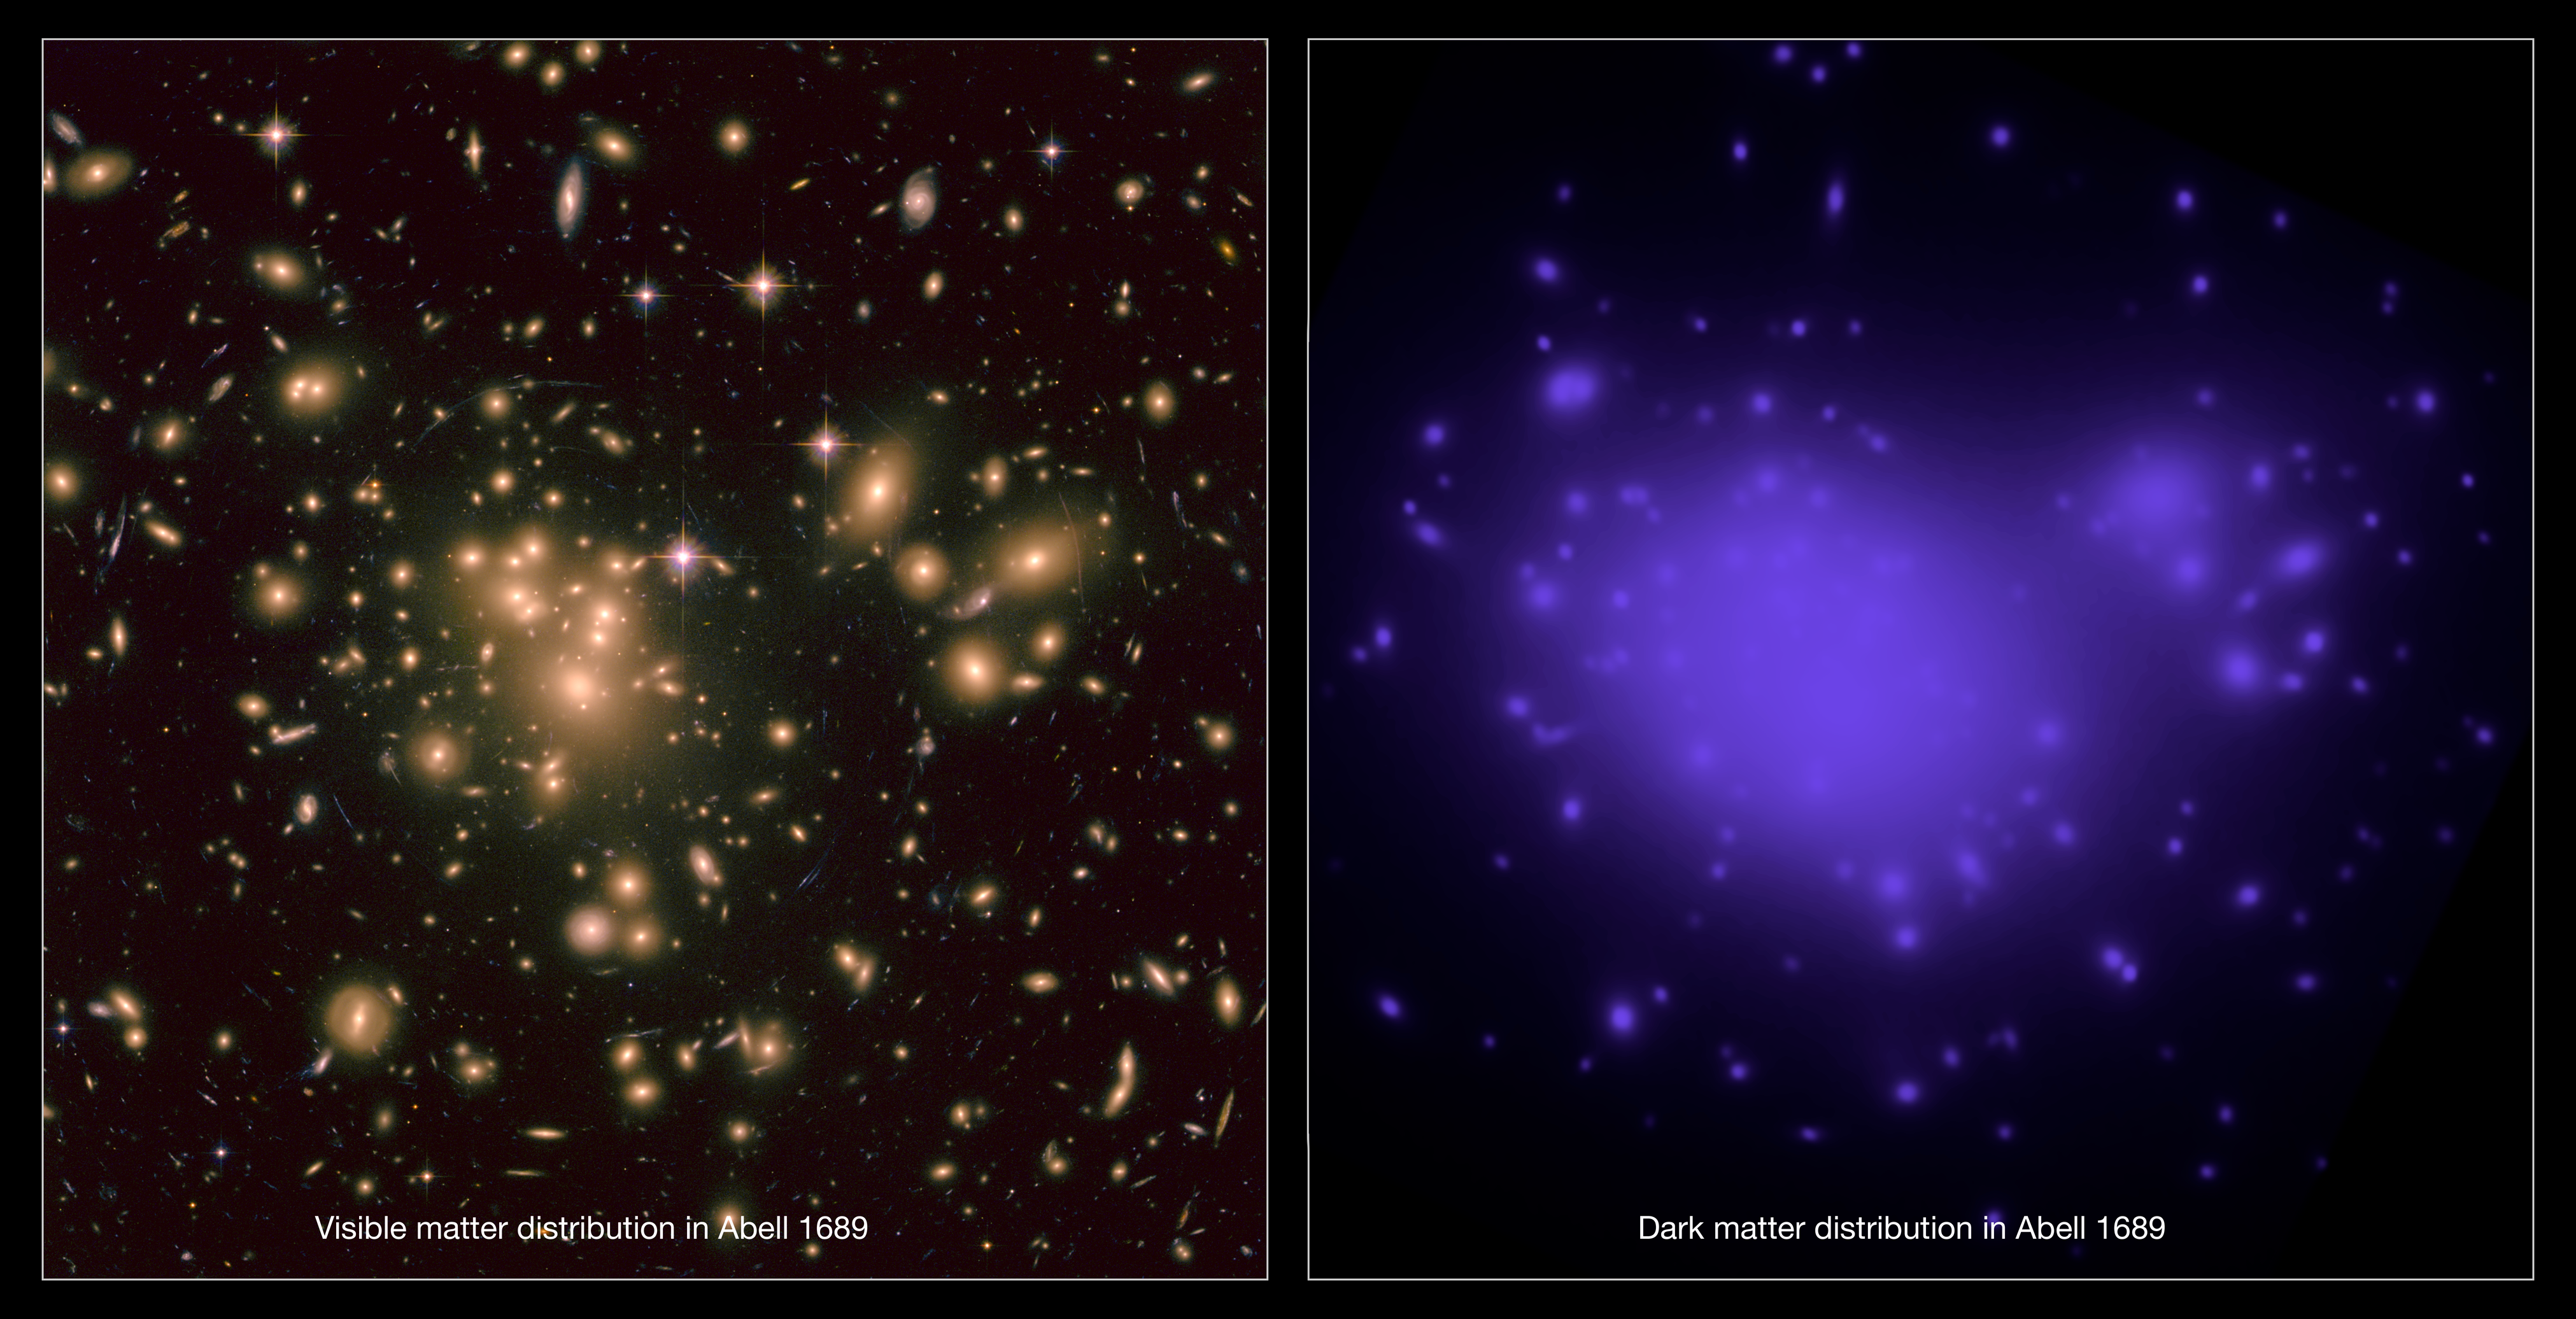

Distribution of light and mass in Abell 1689

This image shows (to the left) the visible matter in galaxy cluster Abell 1689 along with the distorted background galaxies clearly visible.

These galaxies are distorted both by the mass in the gravitational lens and the effect of dark energy on the geometry of the Universe.

To the right the mass distribution of the dark matter in the gravitational lens is shown in purple.

The visible matter and dark matter together form the gravitational lens.

Credit: NASA, ESA, E. Jullo (JPL/LAM), P. Natarajan (Yale) and J-P. Kneib (LAM).